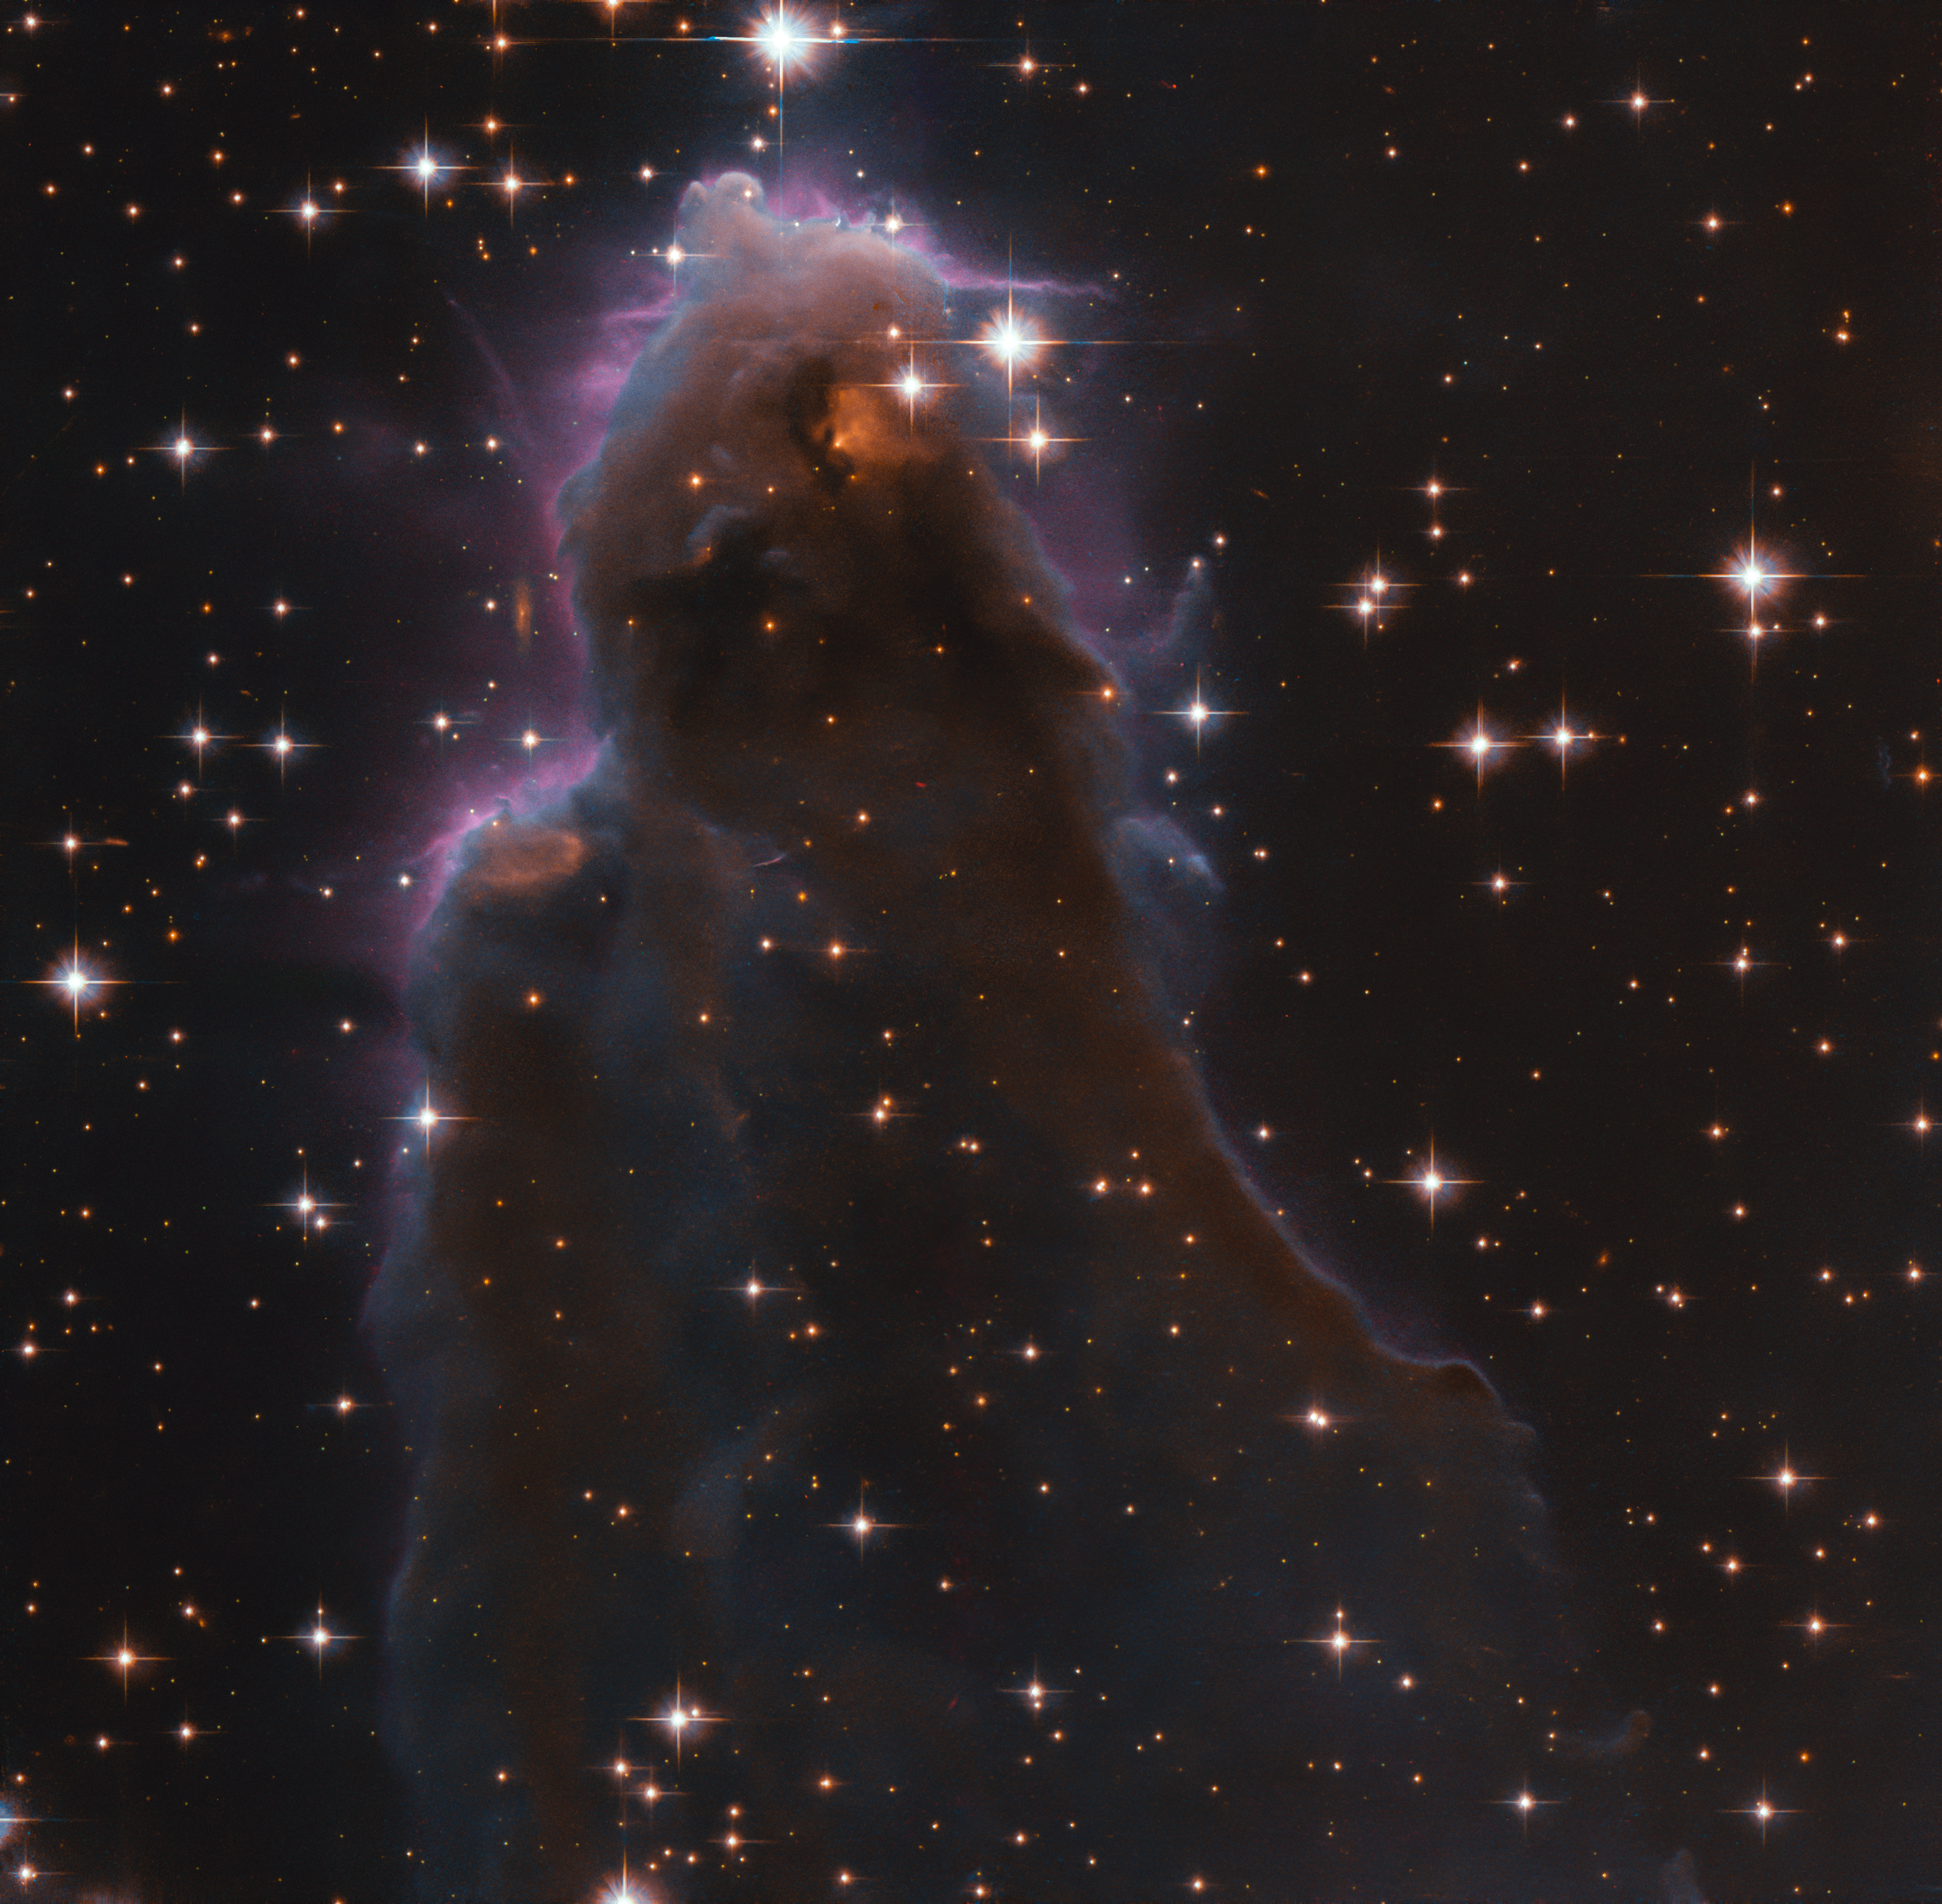

A frEGGS-plosion of Star Formation

This image, taken with the NASA/ESA Hubble Space Telescope, depicts a special class of star-forming nursery known as Free-floating Evaporating Gaseous Globules, or frEGGs for short. This object is formally known as J025157.5+600606.

When a massive new star starts to shine while still within the cool molecular cloud from which it formed, its energetic radiation can ionise the cloud’s hydrogen and create a large, hot bubble of ionised gas. Amazingly, located within this bubble of hot gas around a nearby massive star are the frEGGs: dark compact globules of dust and gas, some of which are giving birth to low-mass stars. The boundary between the cool, dusty frEGG and the hot gas bubble is seen as the glowing purple/blue edges in this fascinating image.

In July 2020 a previous ESA/Hubble Picture of the Week, of J025027.7+600849, featured another frEEG.

Credit: ESA/Hubble & NASA, R. Sahai